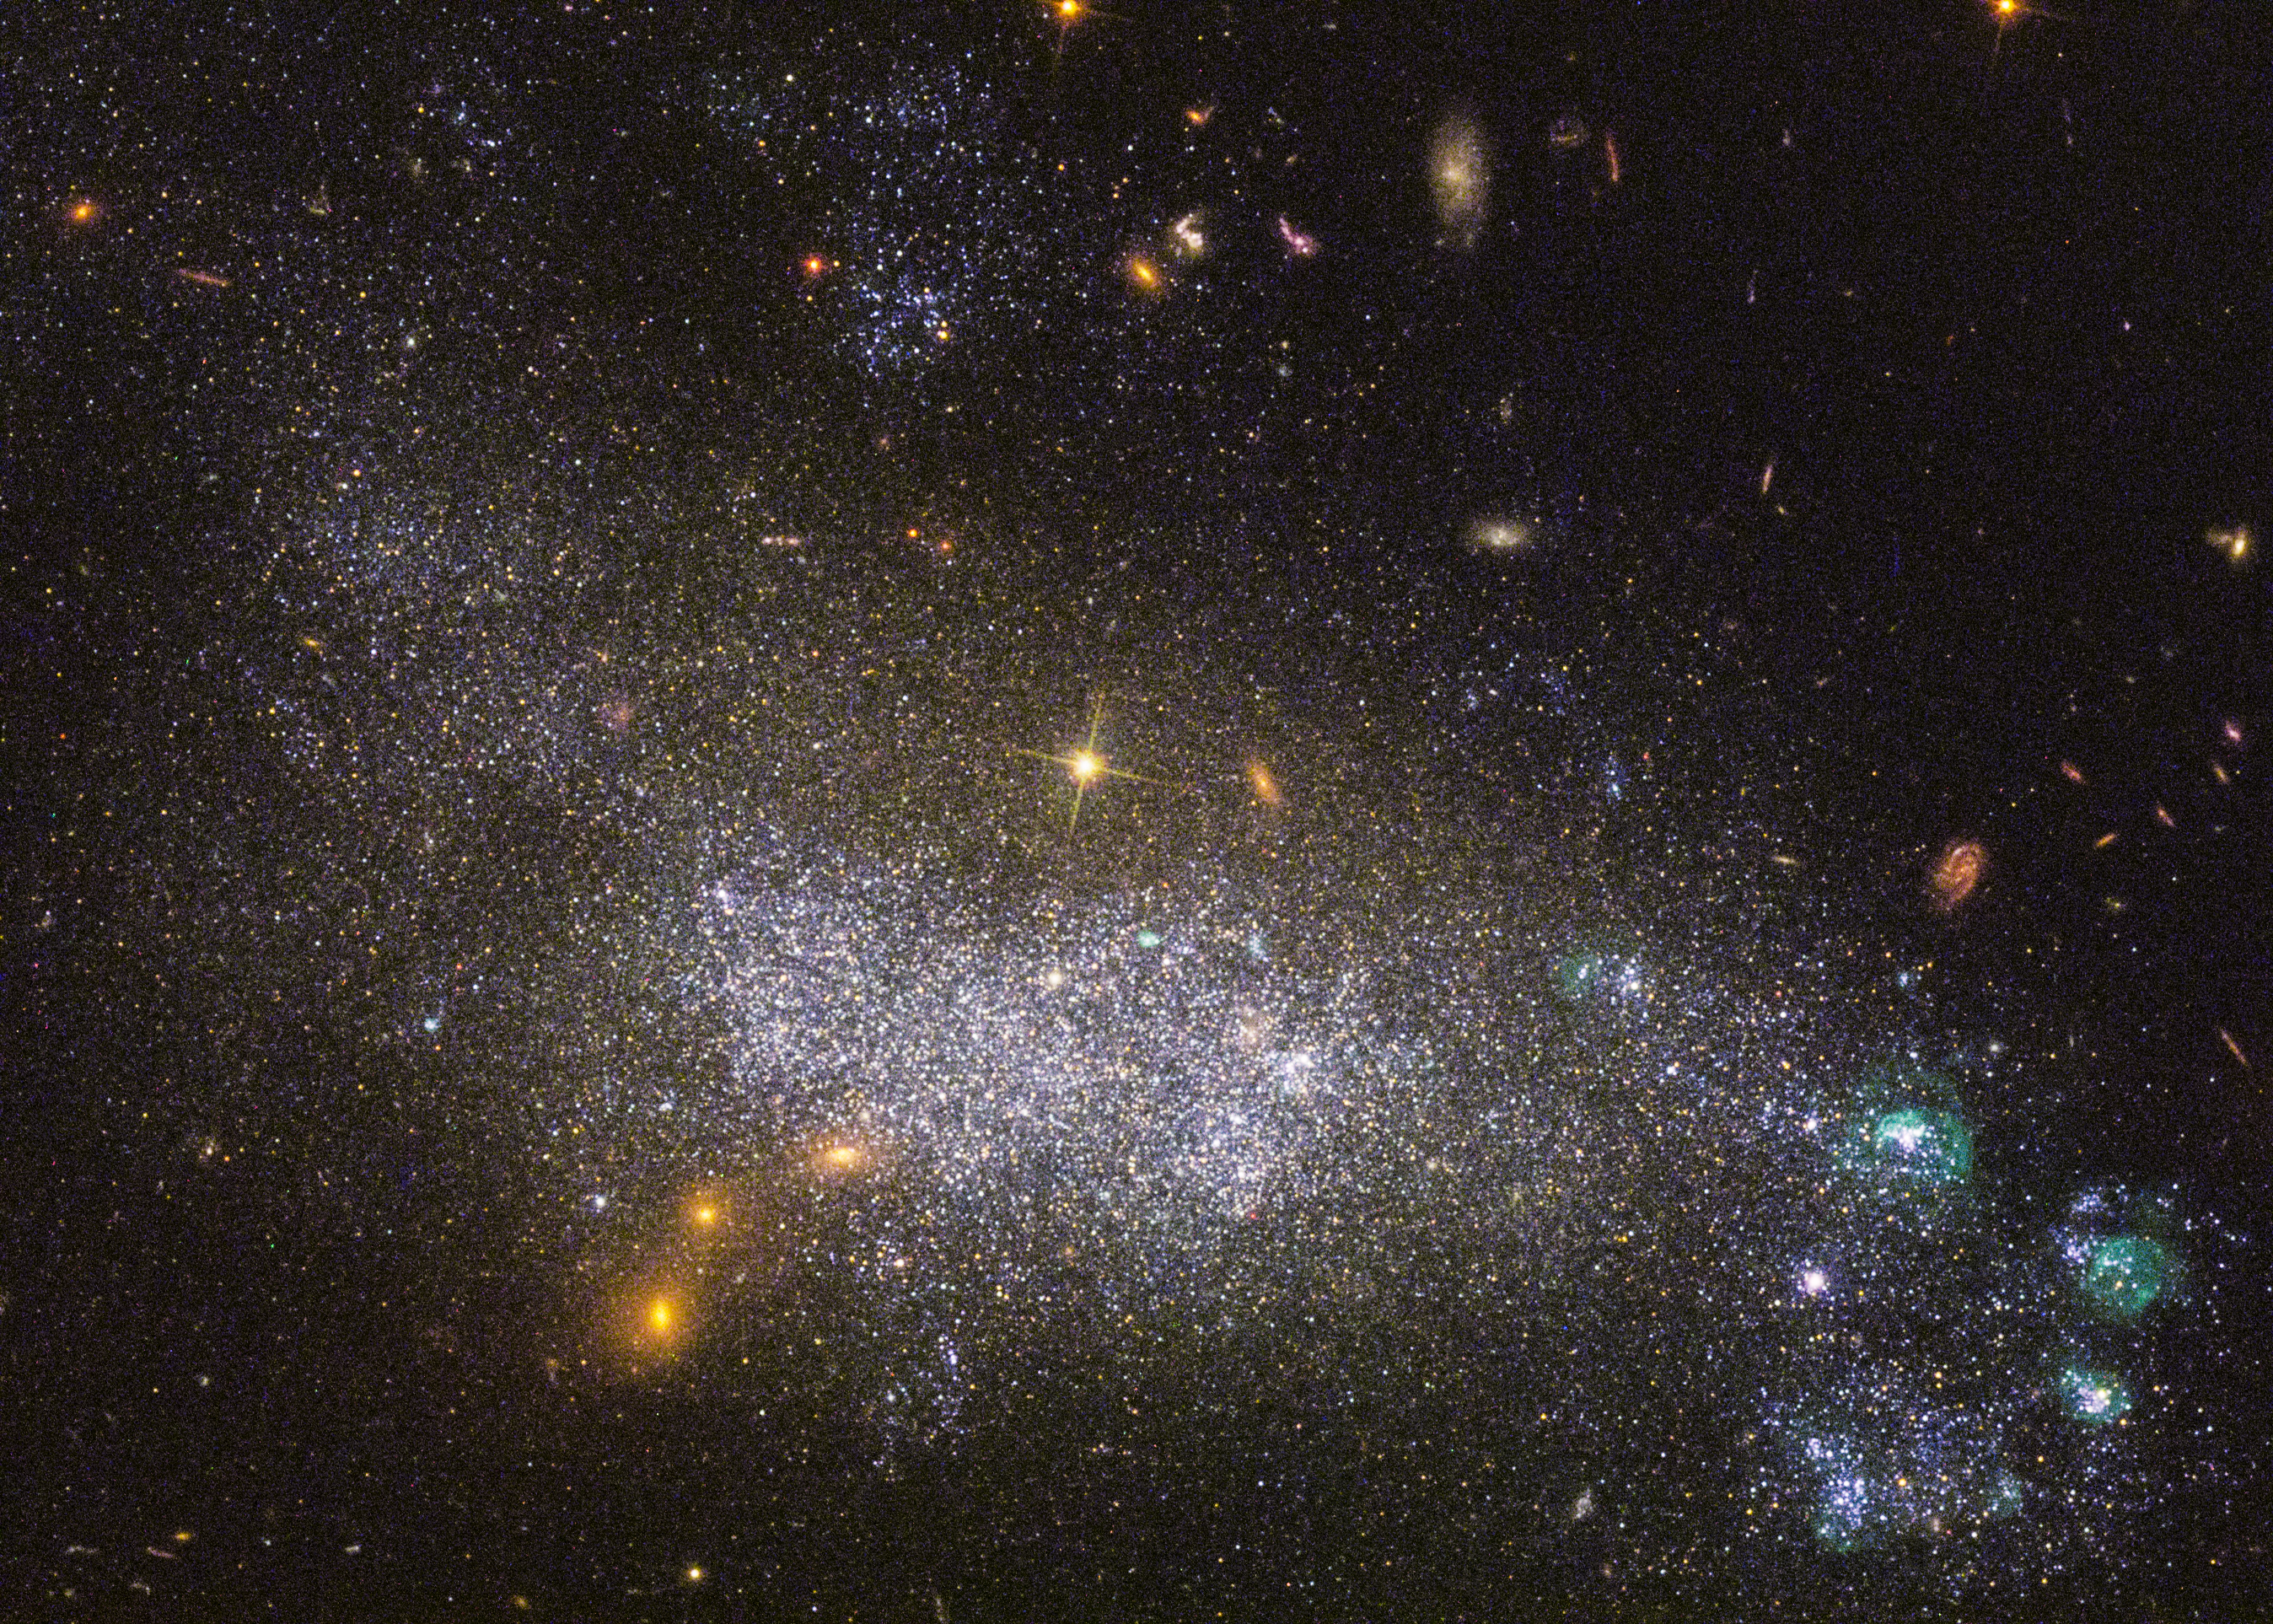

Pockets of star formation in DDO 68

The dwarf galaxy DDO 68, also known as UGC 5340, lies about 40 million light-years away from Earth. Due to its proximity it became one of the 50 targets of LEGUS.

In UGC 5340, a pocket of rapid star birth appears in the lower right corner. This region of star formation was probably triggered by a gravitational interaction with an unseen companion galaxy. But star formation is present across the entire body of UGC 5340, and the relatively young stars are responsible for the galaxy’s blue-white colour.

An image of this galaxy was already released back in 2014 (heic1421). This newly-processed image now also shows ultraviolet radiation Hubble captured from the galaxy.

Credit: NASA, ESA, and the LEGUS team